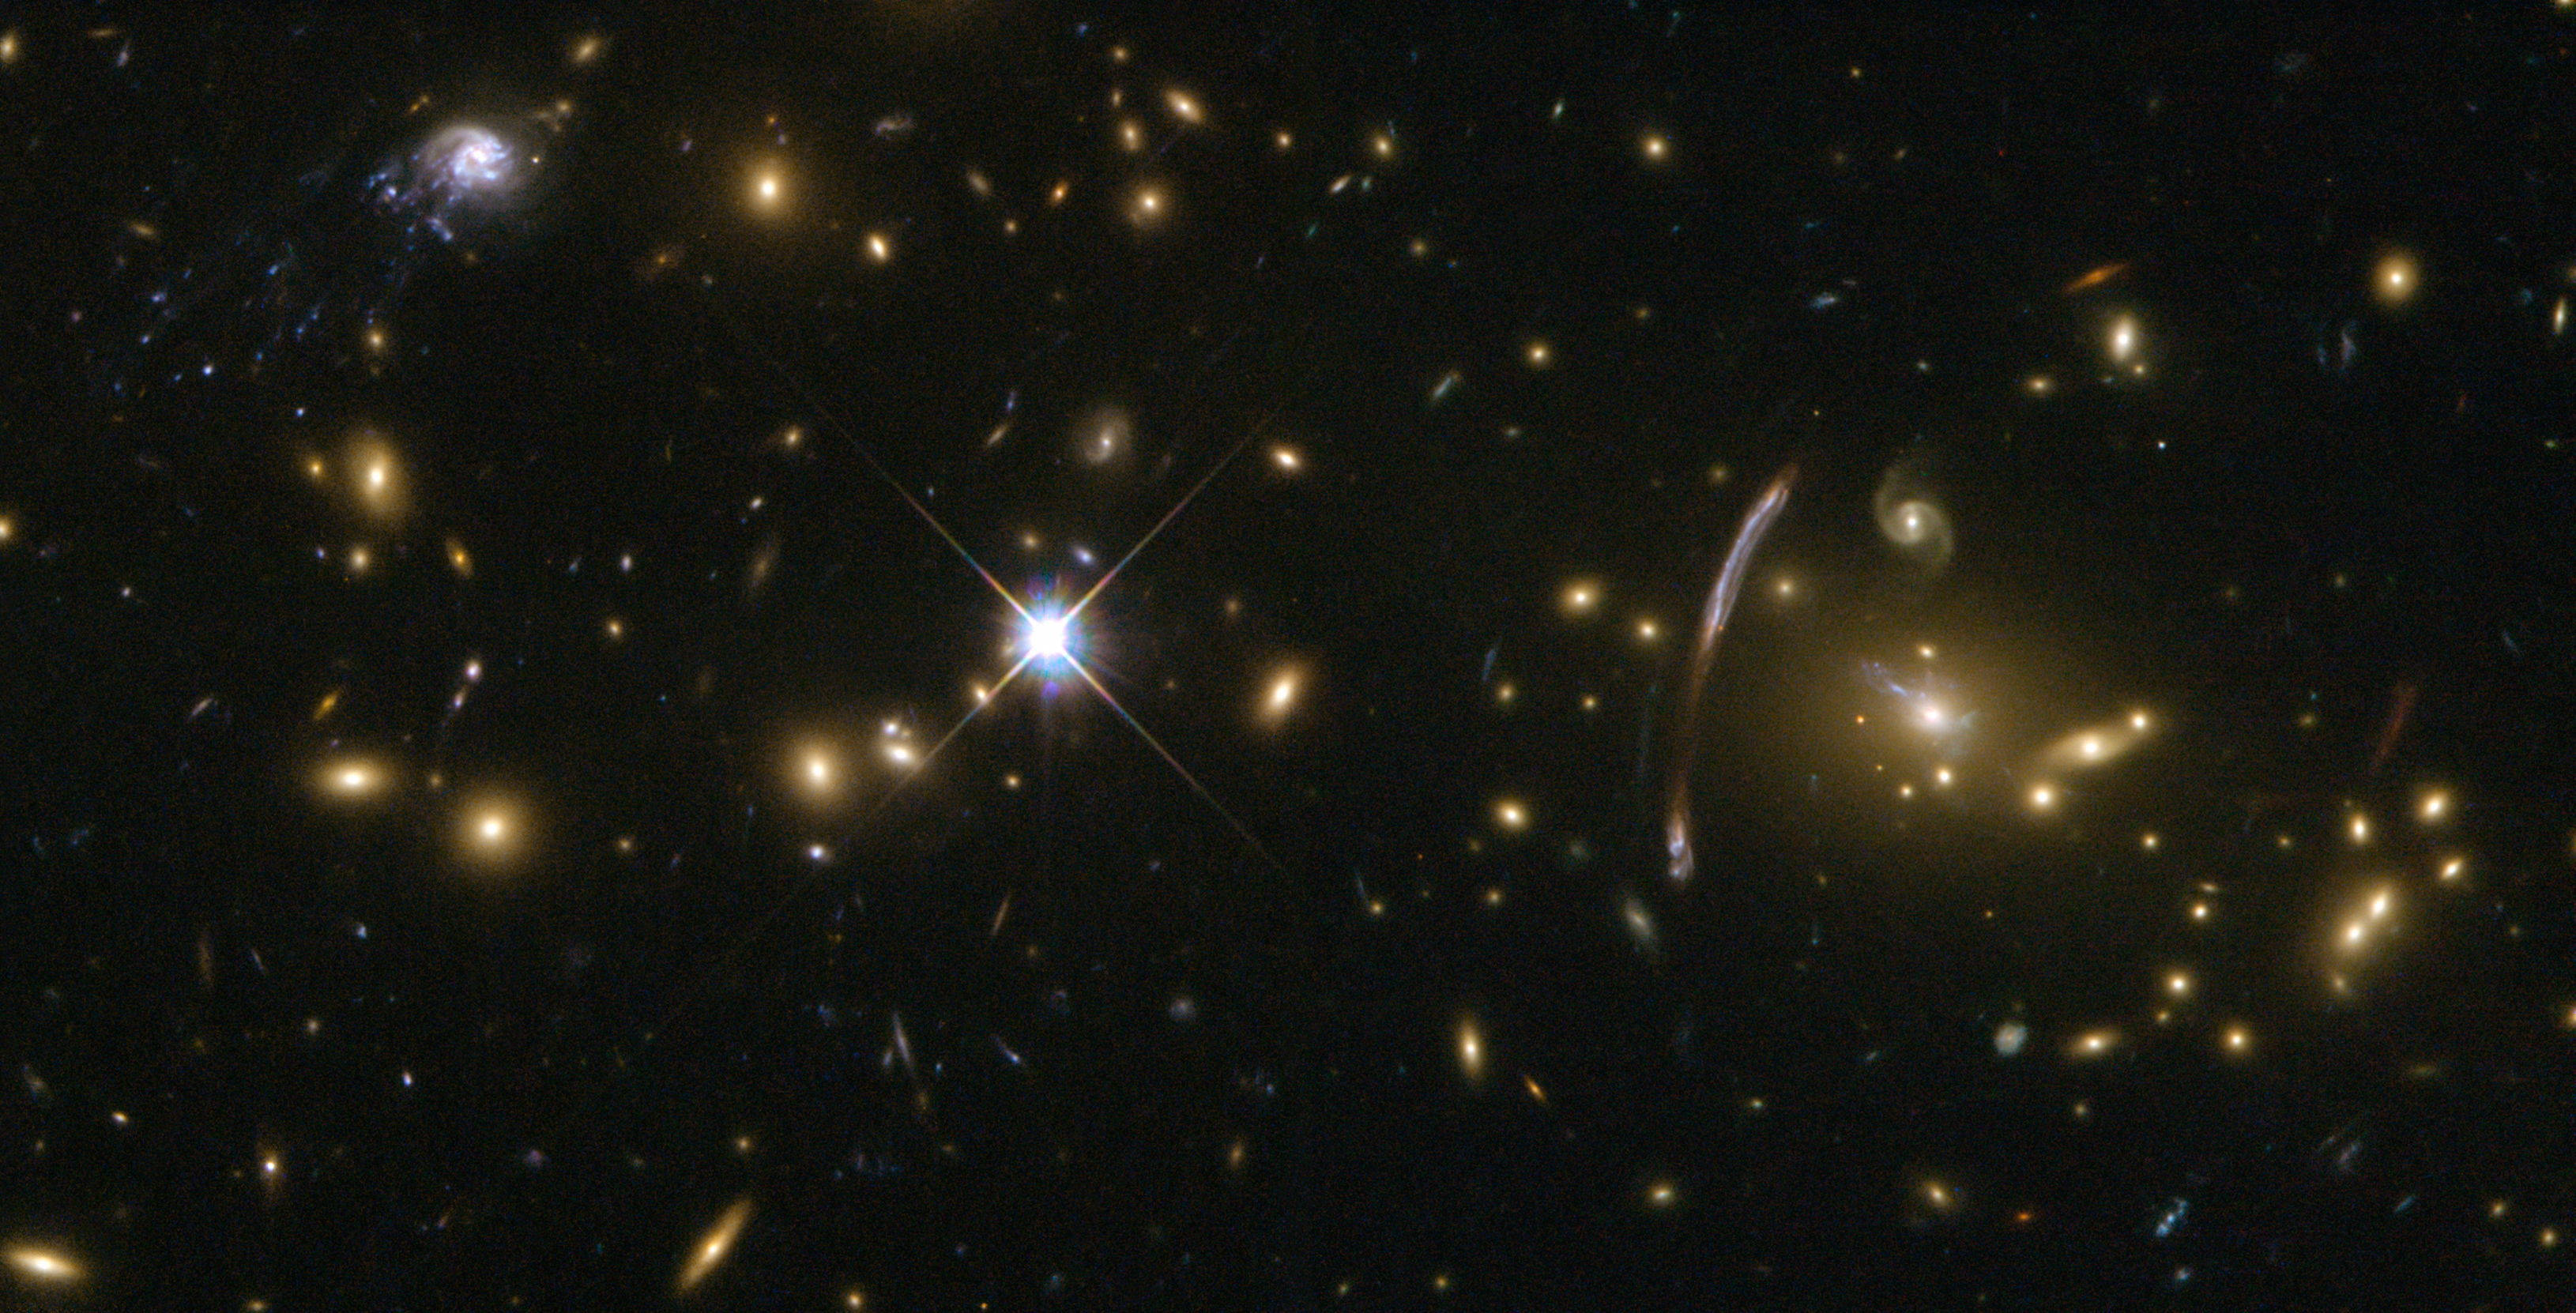

The "Comet Galaxy" as seen with Hubble

While looking at the galaxy cluster Abell 2667, astronomers found an odd-looking spiral galaxy (shown here in the upper left hand corner of the image) that ploughs through the cluster after being accelerated to at least 3.5 million km/h by the enormous combined gravity of the cluster's dark matter, hot gas and hundreds of galaxies.

Credit: NASA, ESA, Jean-Paul Kneib (Laboratoire d'Astrophysique de Marseille)